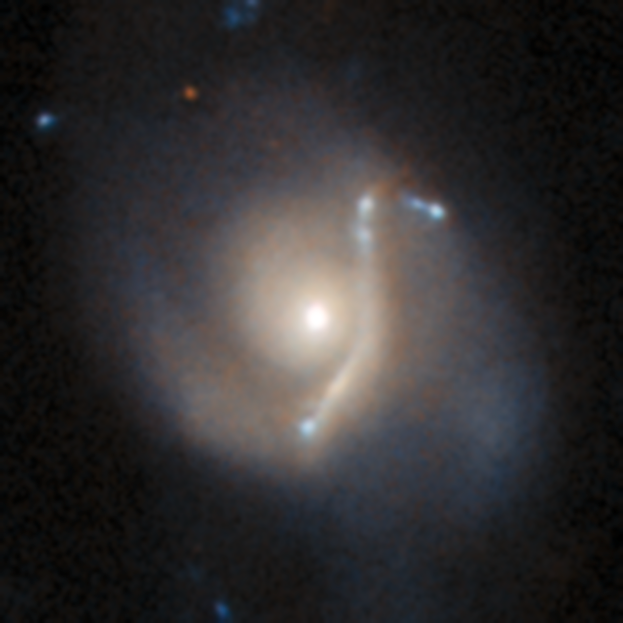

An anomaly from Hubble’s archive — Gravitational lens 1

This is a previously-undiscovered astrophysical anomaly, found in the Hubble Space Telescope’s archive by researchers using a new AI-assisted method. The AI tool allowed them to sift through nearly 100 million image cutouts in just days, turning up rare and anomalous objects like this one.

This image depicts a gravitational lens, where the enormous mass of one galaxy distorts, bends and magnifies light from another galaxy behind it, resulting in a warped image of the background galaxy. The gravitational lens is easily identifiable here, with the lensed galaxy forming an arc around the dense core of the foreground, lensing galaxy.

Read more about this new research here.

Credit: ESA/Hubble & NASA, D. O’Ryan, P. Gómez (European Space Agency), M. Zamani (ESA/Hubble)